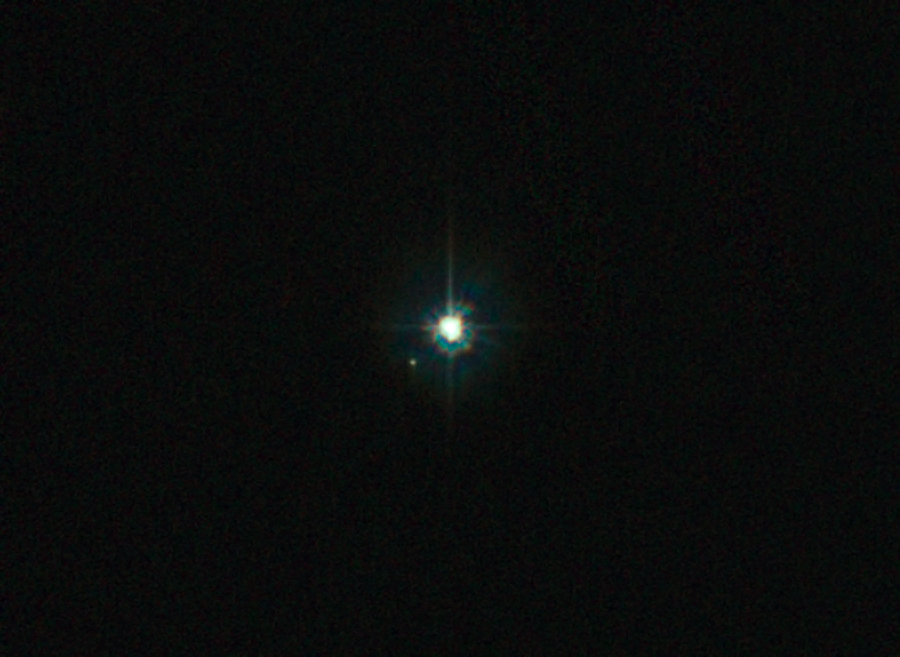

The multiple stellar system of WR 25

In WR 25 two of the stars are so close to each other that they look like a single object, but Hubble's Advanced Camera for Surveys shows them as two.

Credit: NASA, ESA and Jesús Maíz Apellániz (Instituto de Astrofísica de Andalucía, Spain)